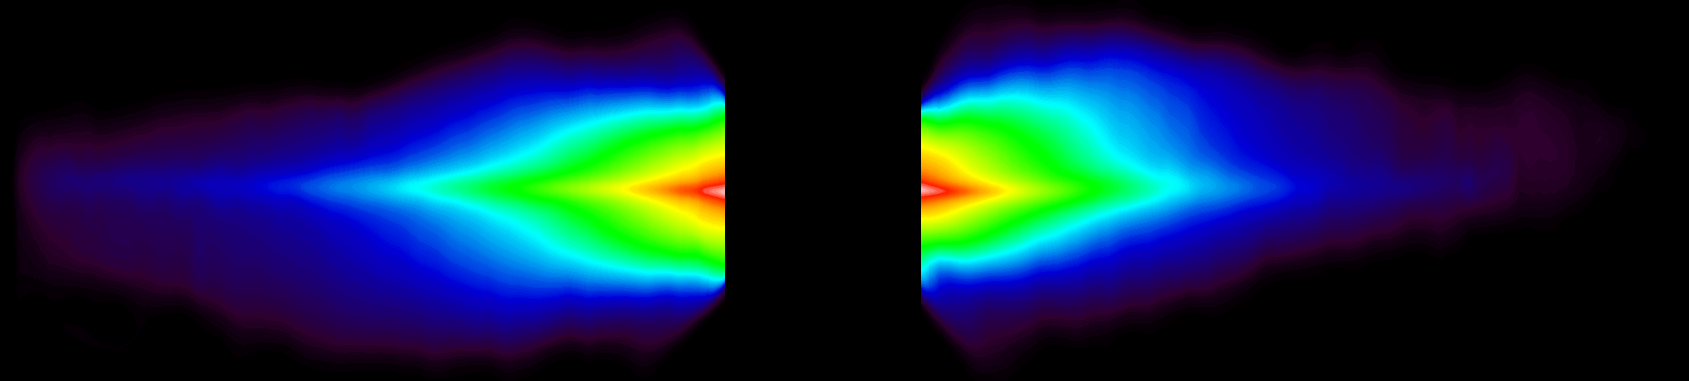

Circumstellar Disk Around Beta Pictoris

This Wide Field Planetary Camera 2 image shows the full extent of the disk, which spans 140 billion miles (1500 astronomical units) edge-to-edge. An unusual flaring at the top of the right side of the disk (the Southwest side of the disk) shows that dust has been pulled above the dense plane of the disk beyond what is observed in the left side. A gravitational perturbation by an unseen substellar- mass companion farther from the star than planets would be, or a tug from a bypassing star might cause this flaring. The image was taken on June 22, 1995.

Credit: Al Schultz (CSC/STScI, and NASA/ESA)